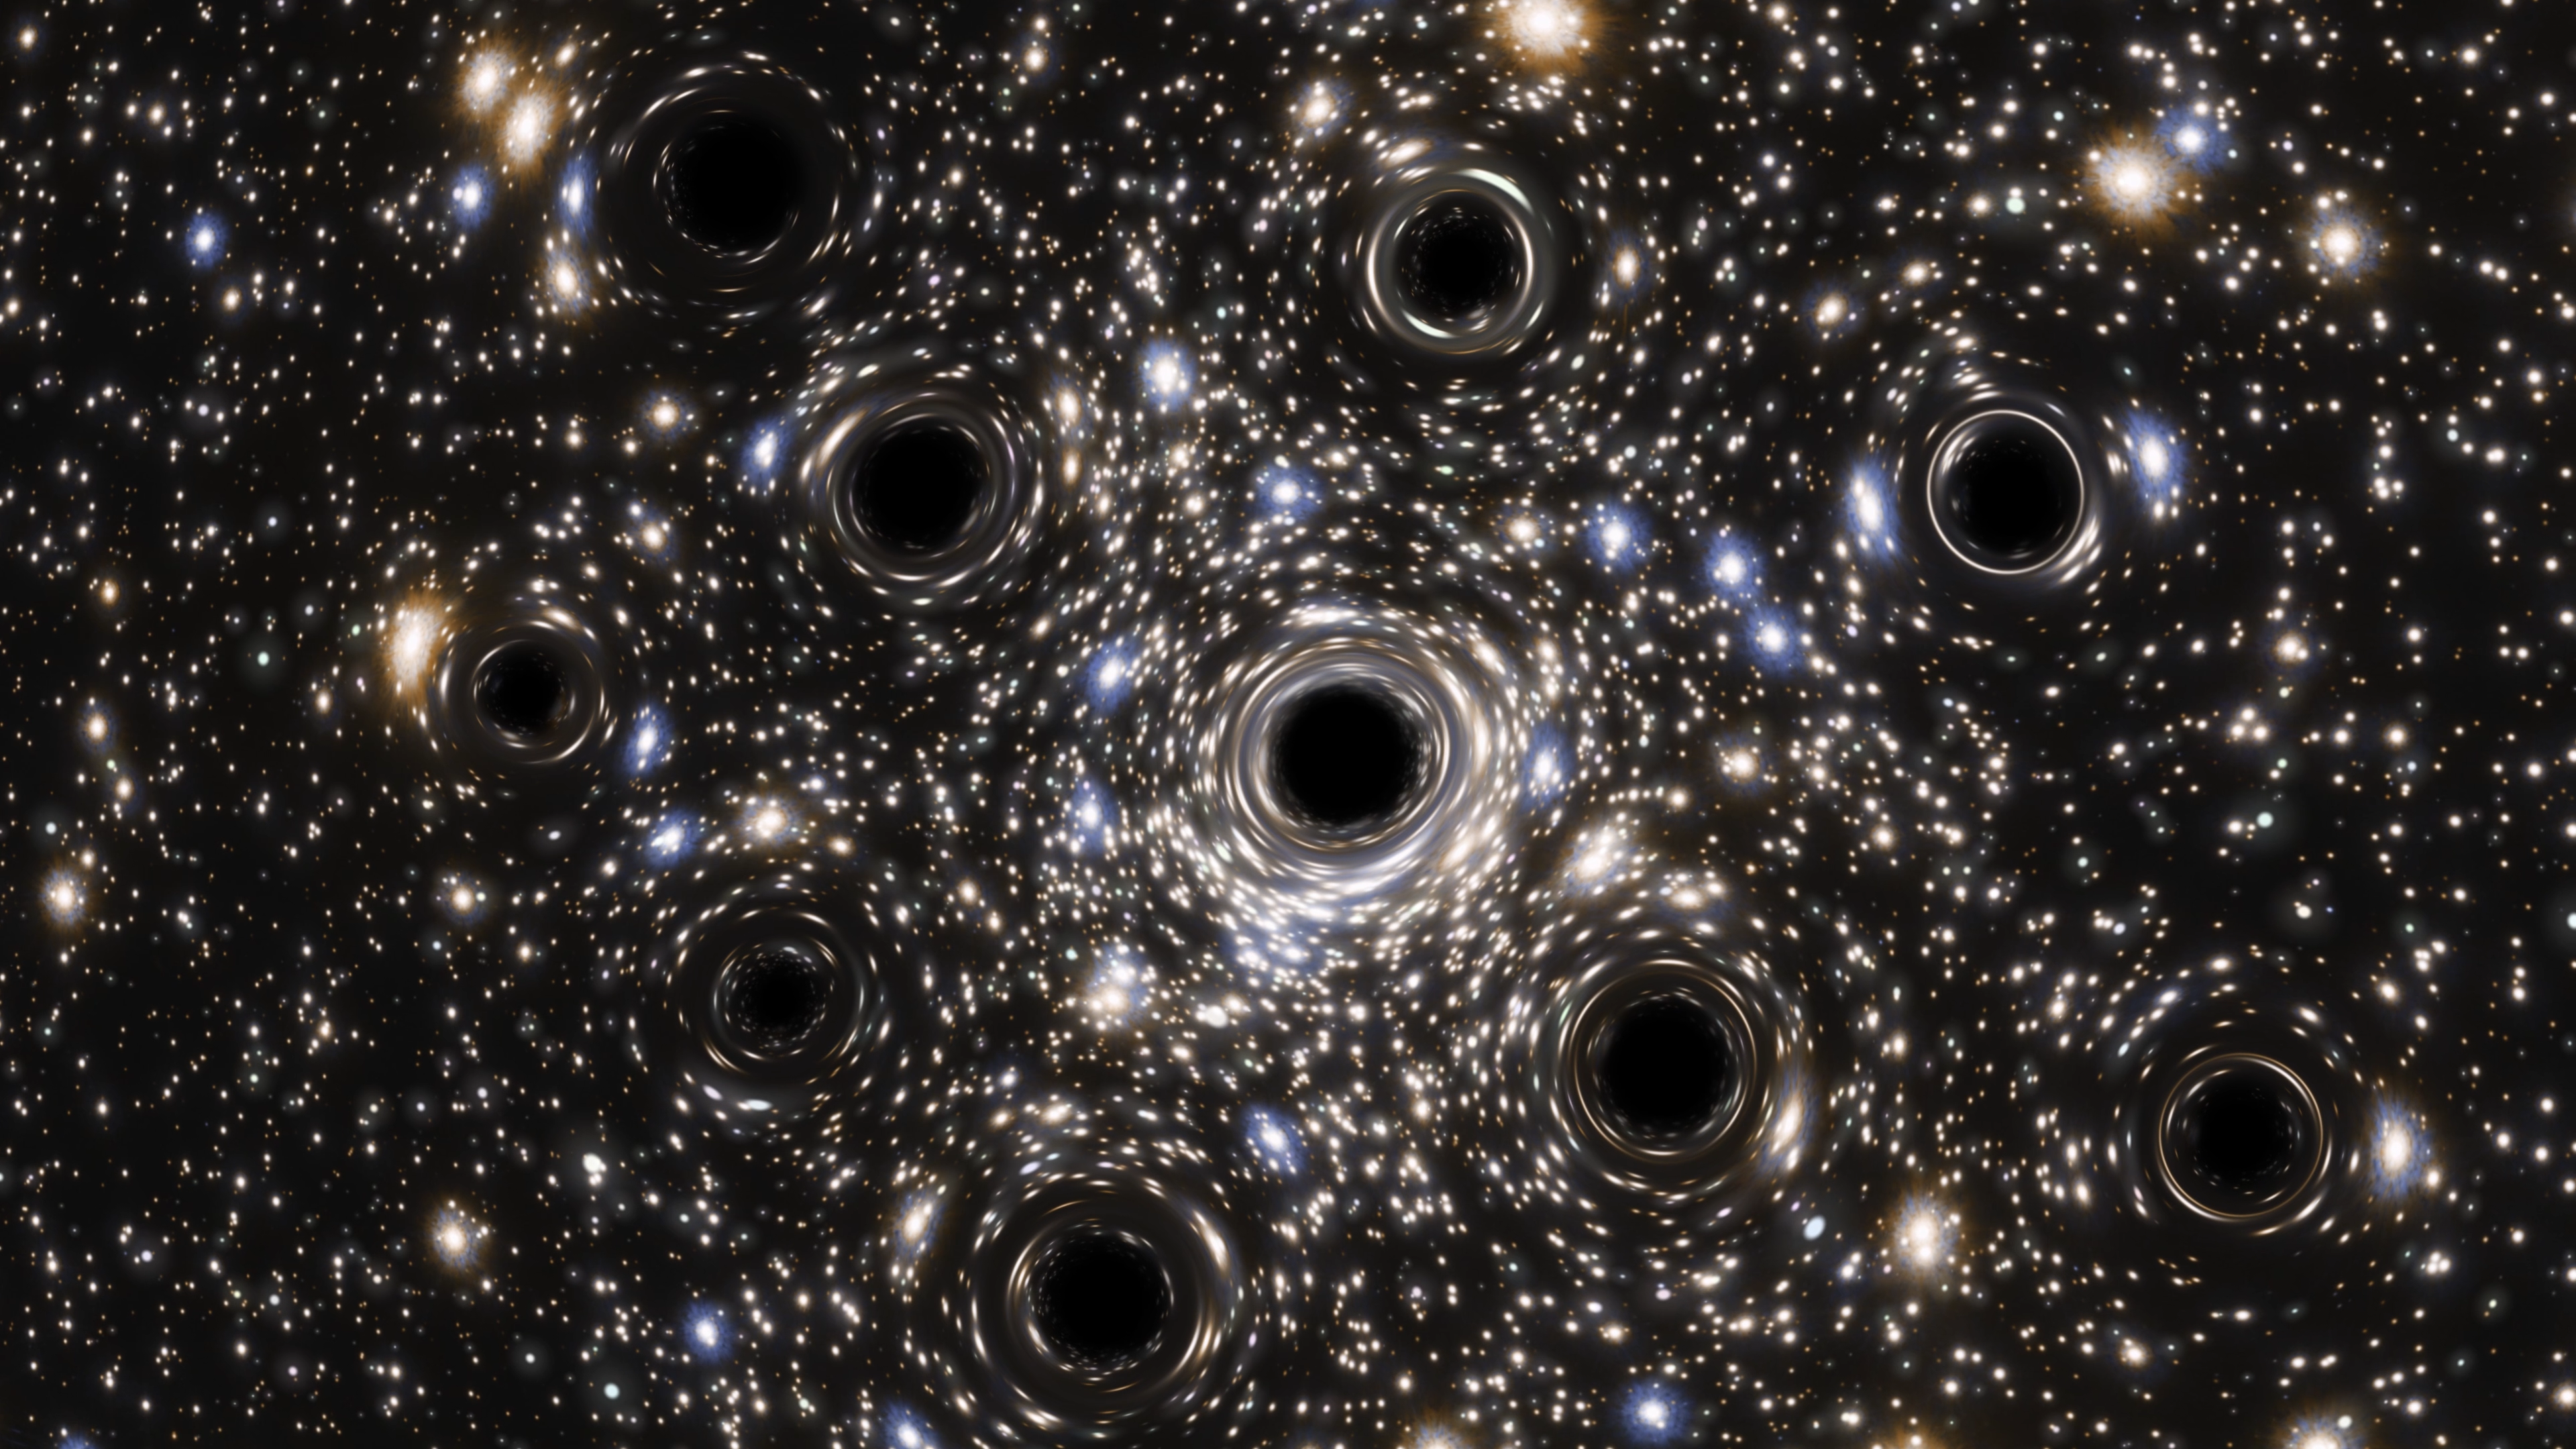

Artist’s Impression of the Black Hole Concentration in NGC 6397

Scientists were expecting to find an intermediate-mass black hole at the heart of the globular cluster NGC 6397, but instead they found evidence of a concentration of smaller black holes lurking there. New data from the NASA/ESA Hubble Space Telescope have led to the first measurement of the extent of a collection of black holes in a core-collapsed globular cluster.

This is an artist’s impression created to visualize the concentration of black holes at the center of NGC 6397. In reality, the small black holes here are far too small for the direct observing capacities of any existing or planned future telescope, including Hubble. It is predicted that this core-collapsed globular cluster could be host to more than 20 black holes.

Credit: ESA/Hubble, N. Bartmann